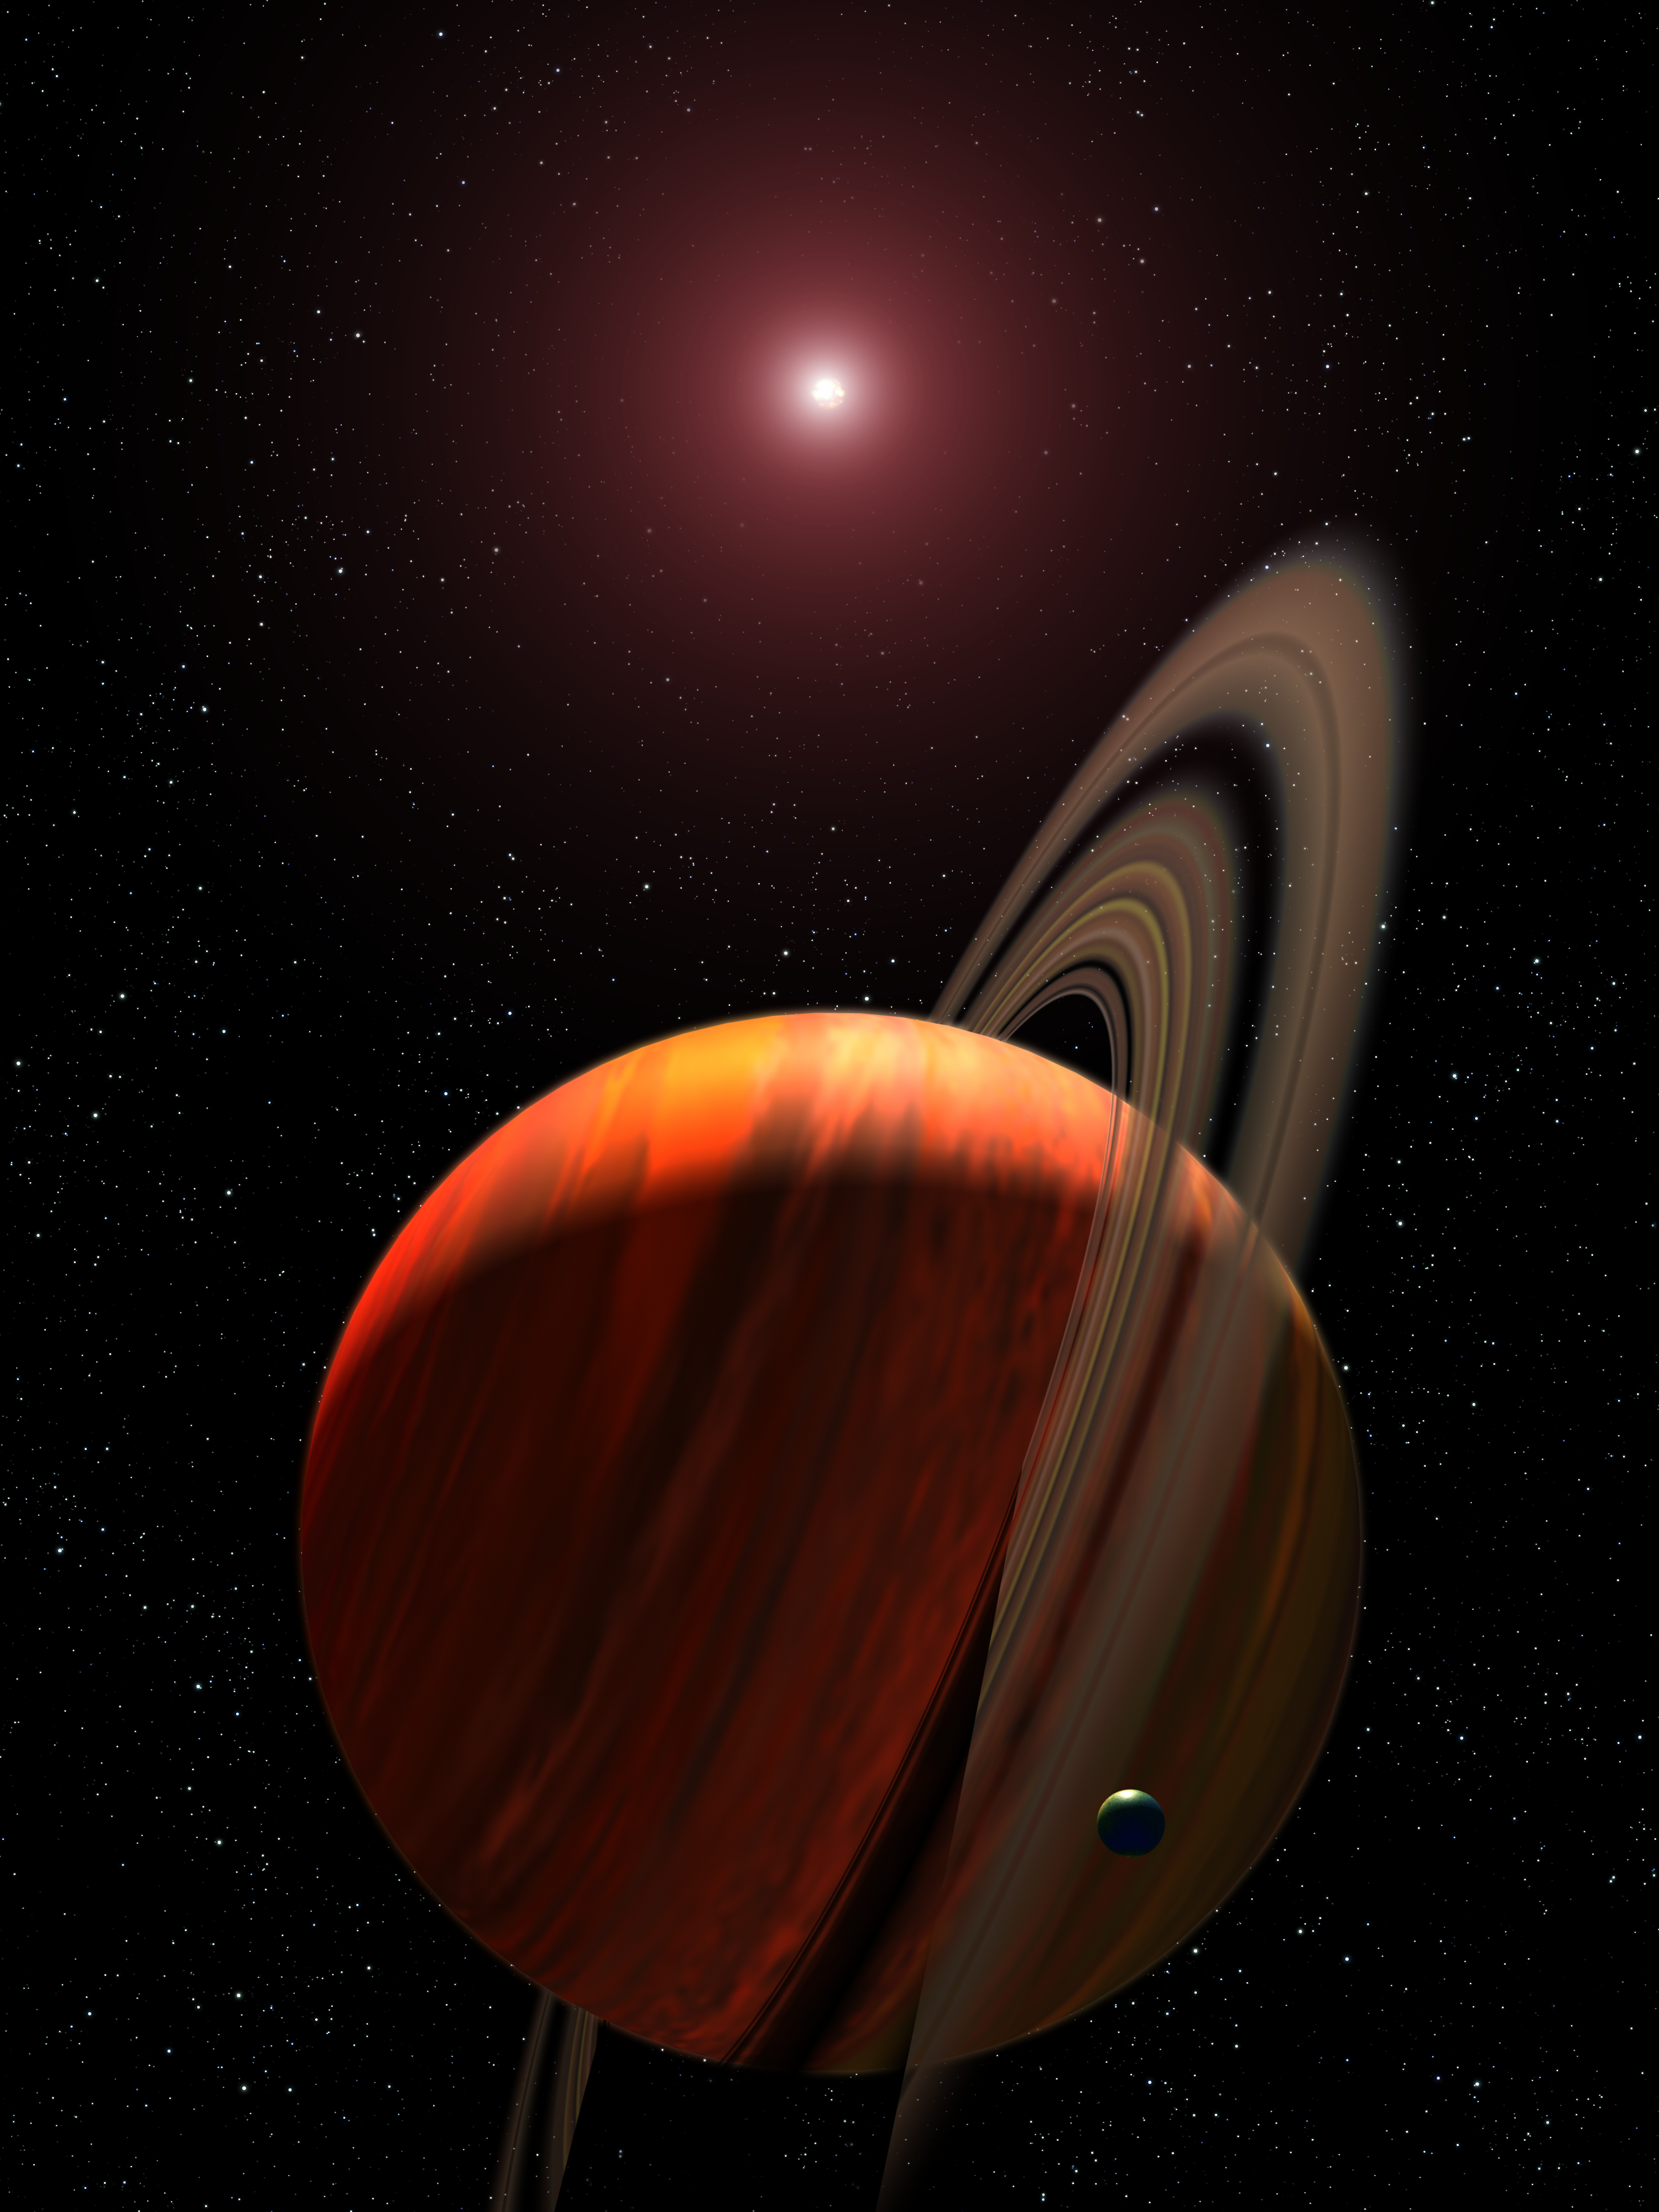

Artist's View of Planet Around a Red Dwarf

This is an artist's concept of a gas giant planet orbiting a red dwarf K star (system name OGLE-2003-BLG-235L/MOA-2003-BLG-53L). The planet has not been directly imaged, but its presence was detected in 2003 microlensing observations of a field star in our galaxy. Gravitational microlensing happens when a foreground star amplifies the light of a background star that momentarily aligns with it. Follow-up observations by Hubble Space Telescope in 2005 separated the light of the slightly offset foreground star from the background star. This allowed the host star to be identified as a red dwarf star located 19,000 light-years away. The Hubble observations allow for the planet's mass to be estimated at 2.6 Jupiter masses. The characteristics of the lensing event show that the planet is in a Jupiter-sized orbit around its parent red star. The rings and moon around the gas giant are hypothetical, but plausible, given the nature of the family of gas giant planets in our solar system.

Credit: NASA, ESA, and G. Bacon (STScI